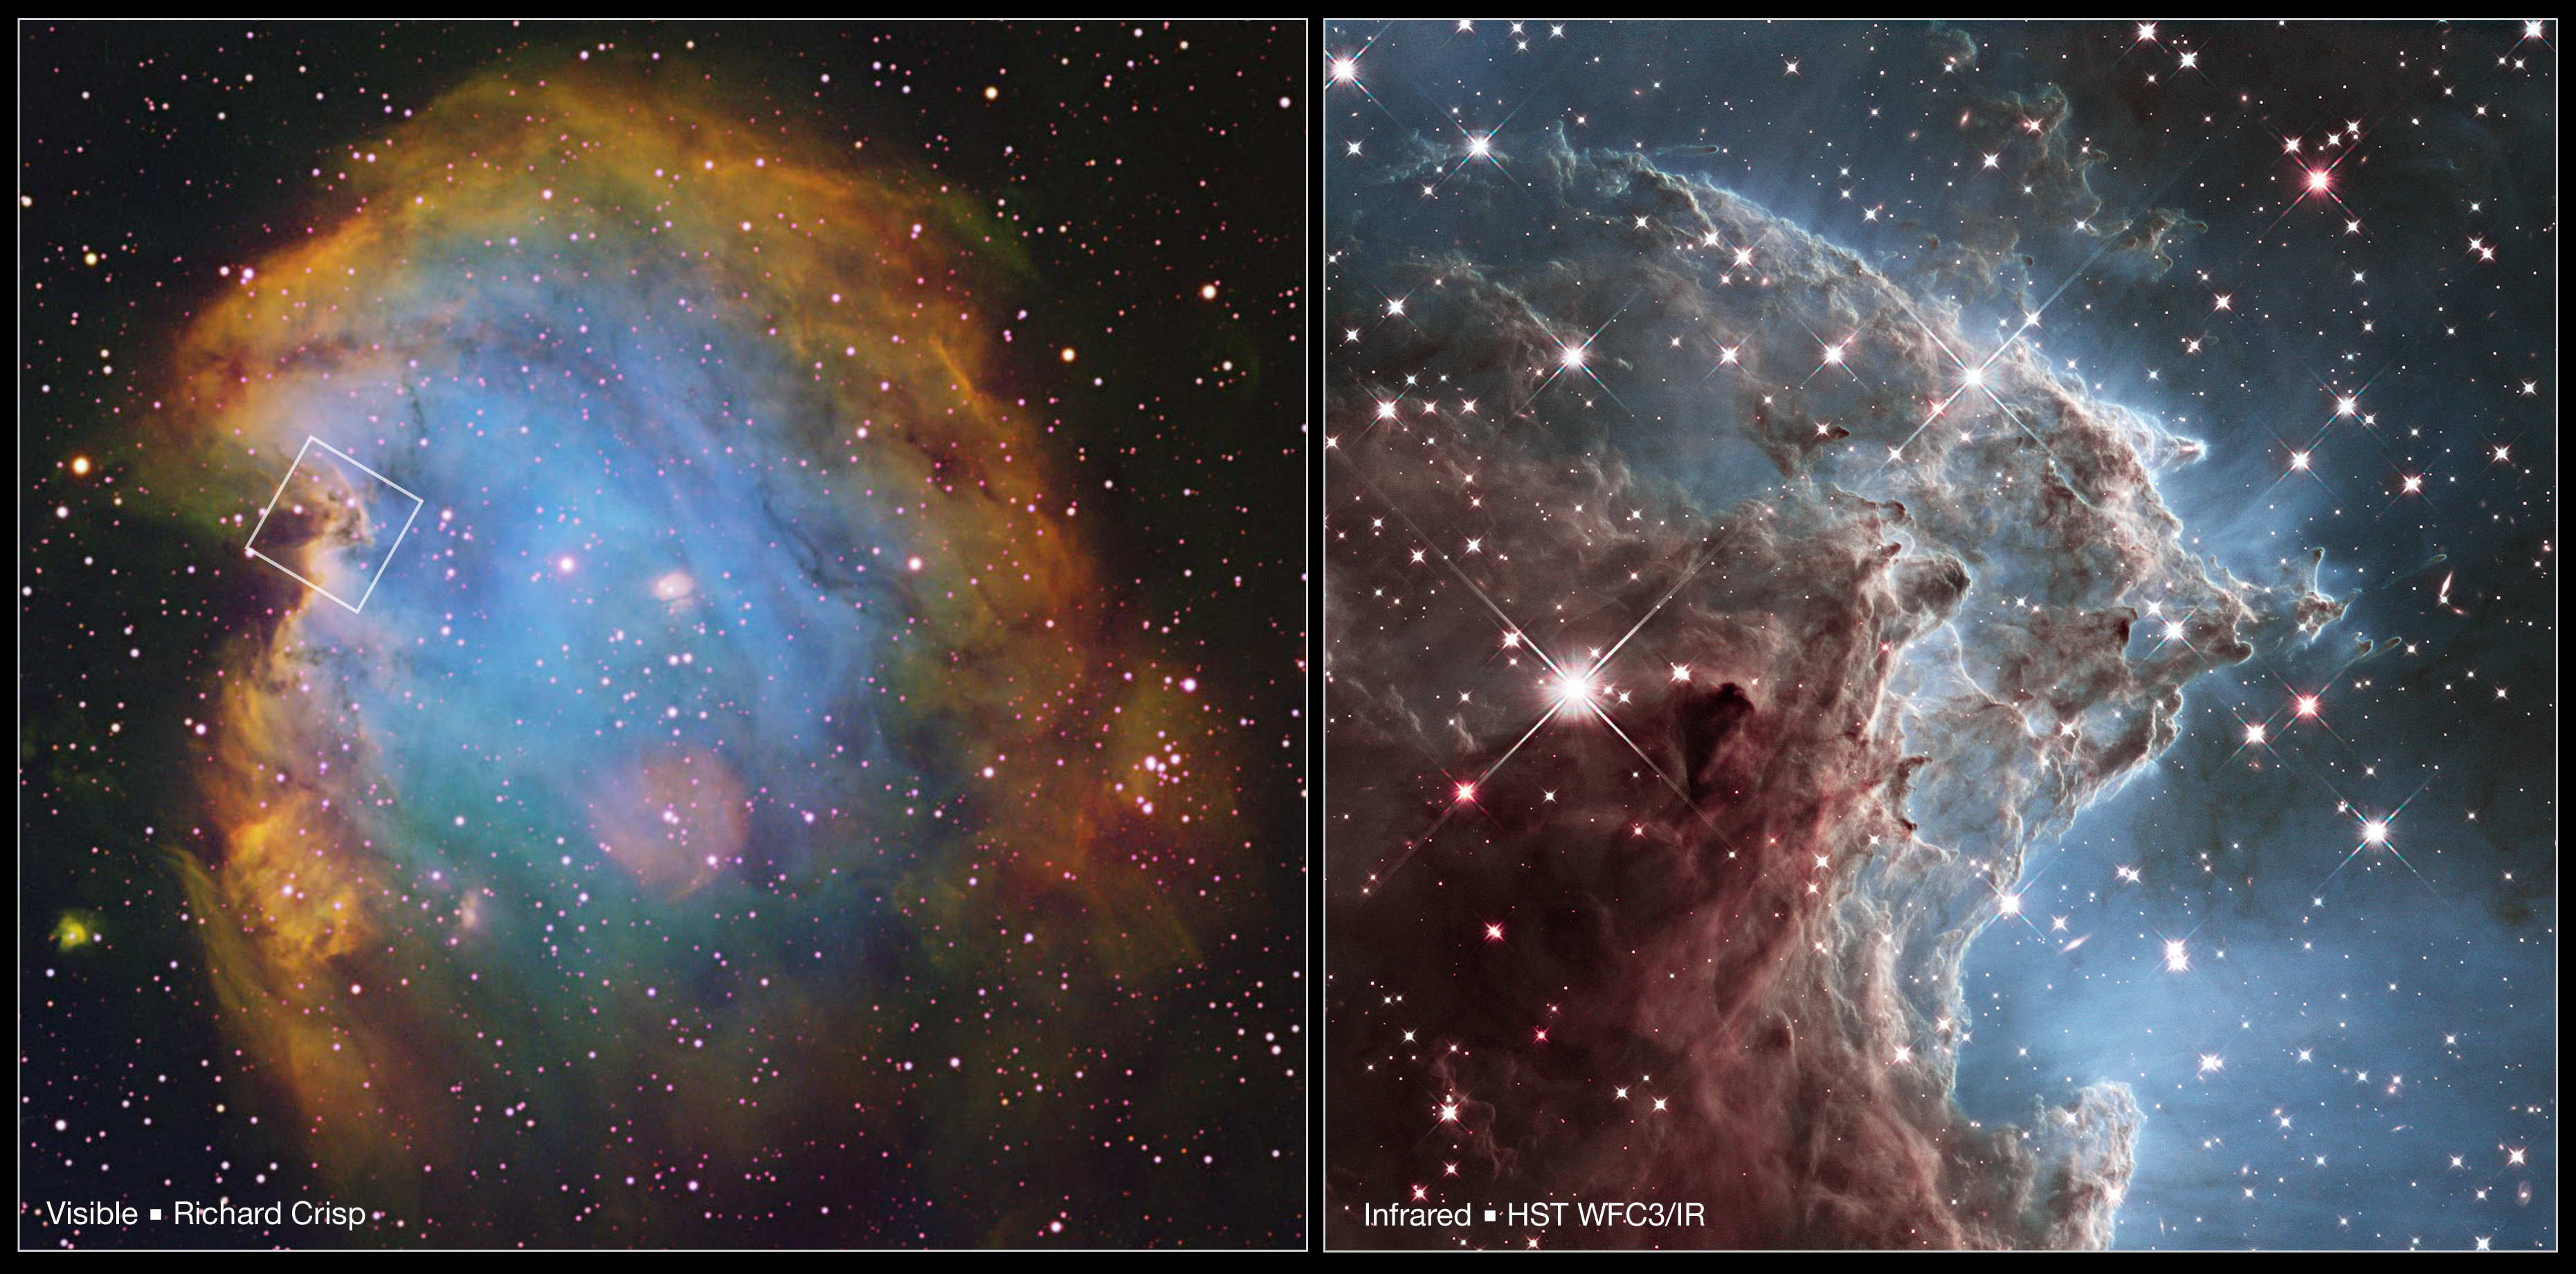

Location of the Hubble IR Detail in NGC 2174

This image shows the region of NGC 2174, taken in infrared and released for Hubble's 24th birthday, in its wider context. On the left is a ground based image taken by an amateur astrophotographer of the star-forming nebula in visible light, with an outline showing the area of the detailed Hubble image. On the right is a small detail of a star-forming column in the nebula, made by Hubble's WFC3 infrared camera.

Credit: NASA and ESA Acknowledgment: NASA, ESA, and the Hubble Heritage Team (STScI/AURA), and R. Crisp